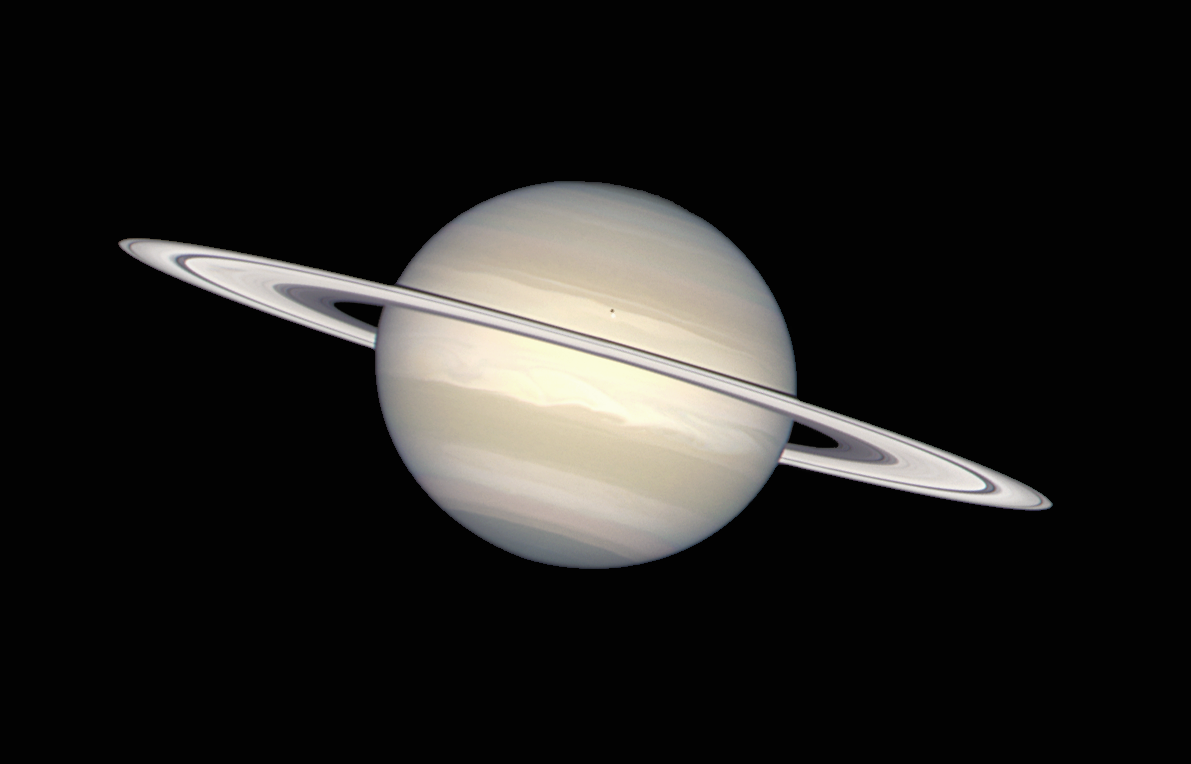

Saturn in natural colours

The NASA/ESA Hubble Space Telescope has provided images of Saturn in many colors, from black-and-white, to orange, to blue, green, and red. But in this picture, image processing specialists have worked to provide a crisp, extremely accurate view of Saturn, which highlights the planet's pastel colors. Bands of subtle colour - yellows, browns, grays - distinguish differences in the clouds over Saturn, the second largest planet in the solar system.

Credit: Hubble Heritage Team (AURA/STScI/NASA/ESA)